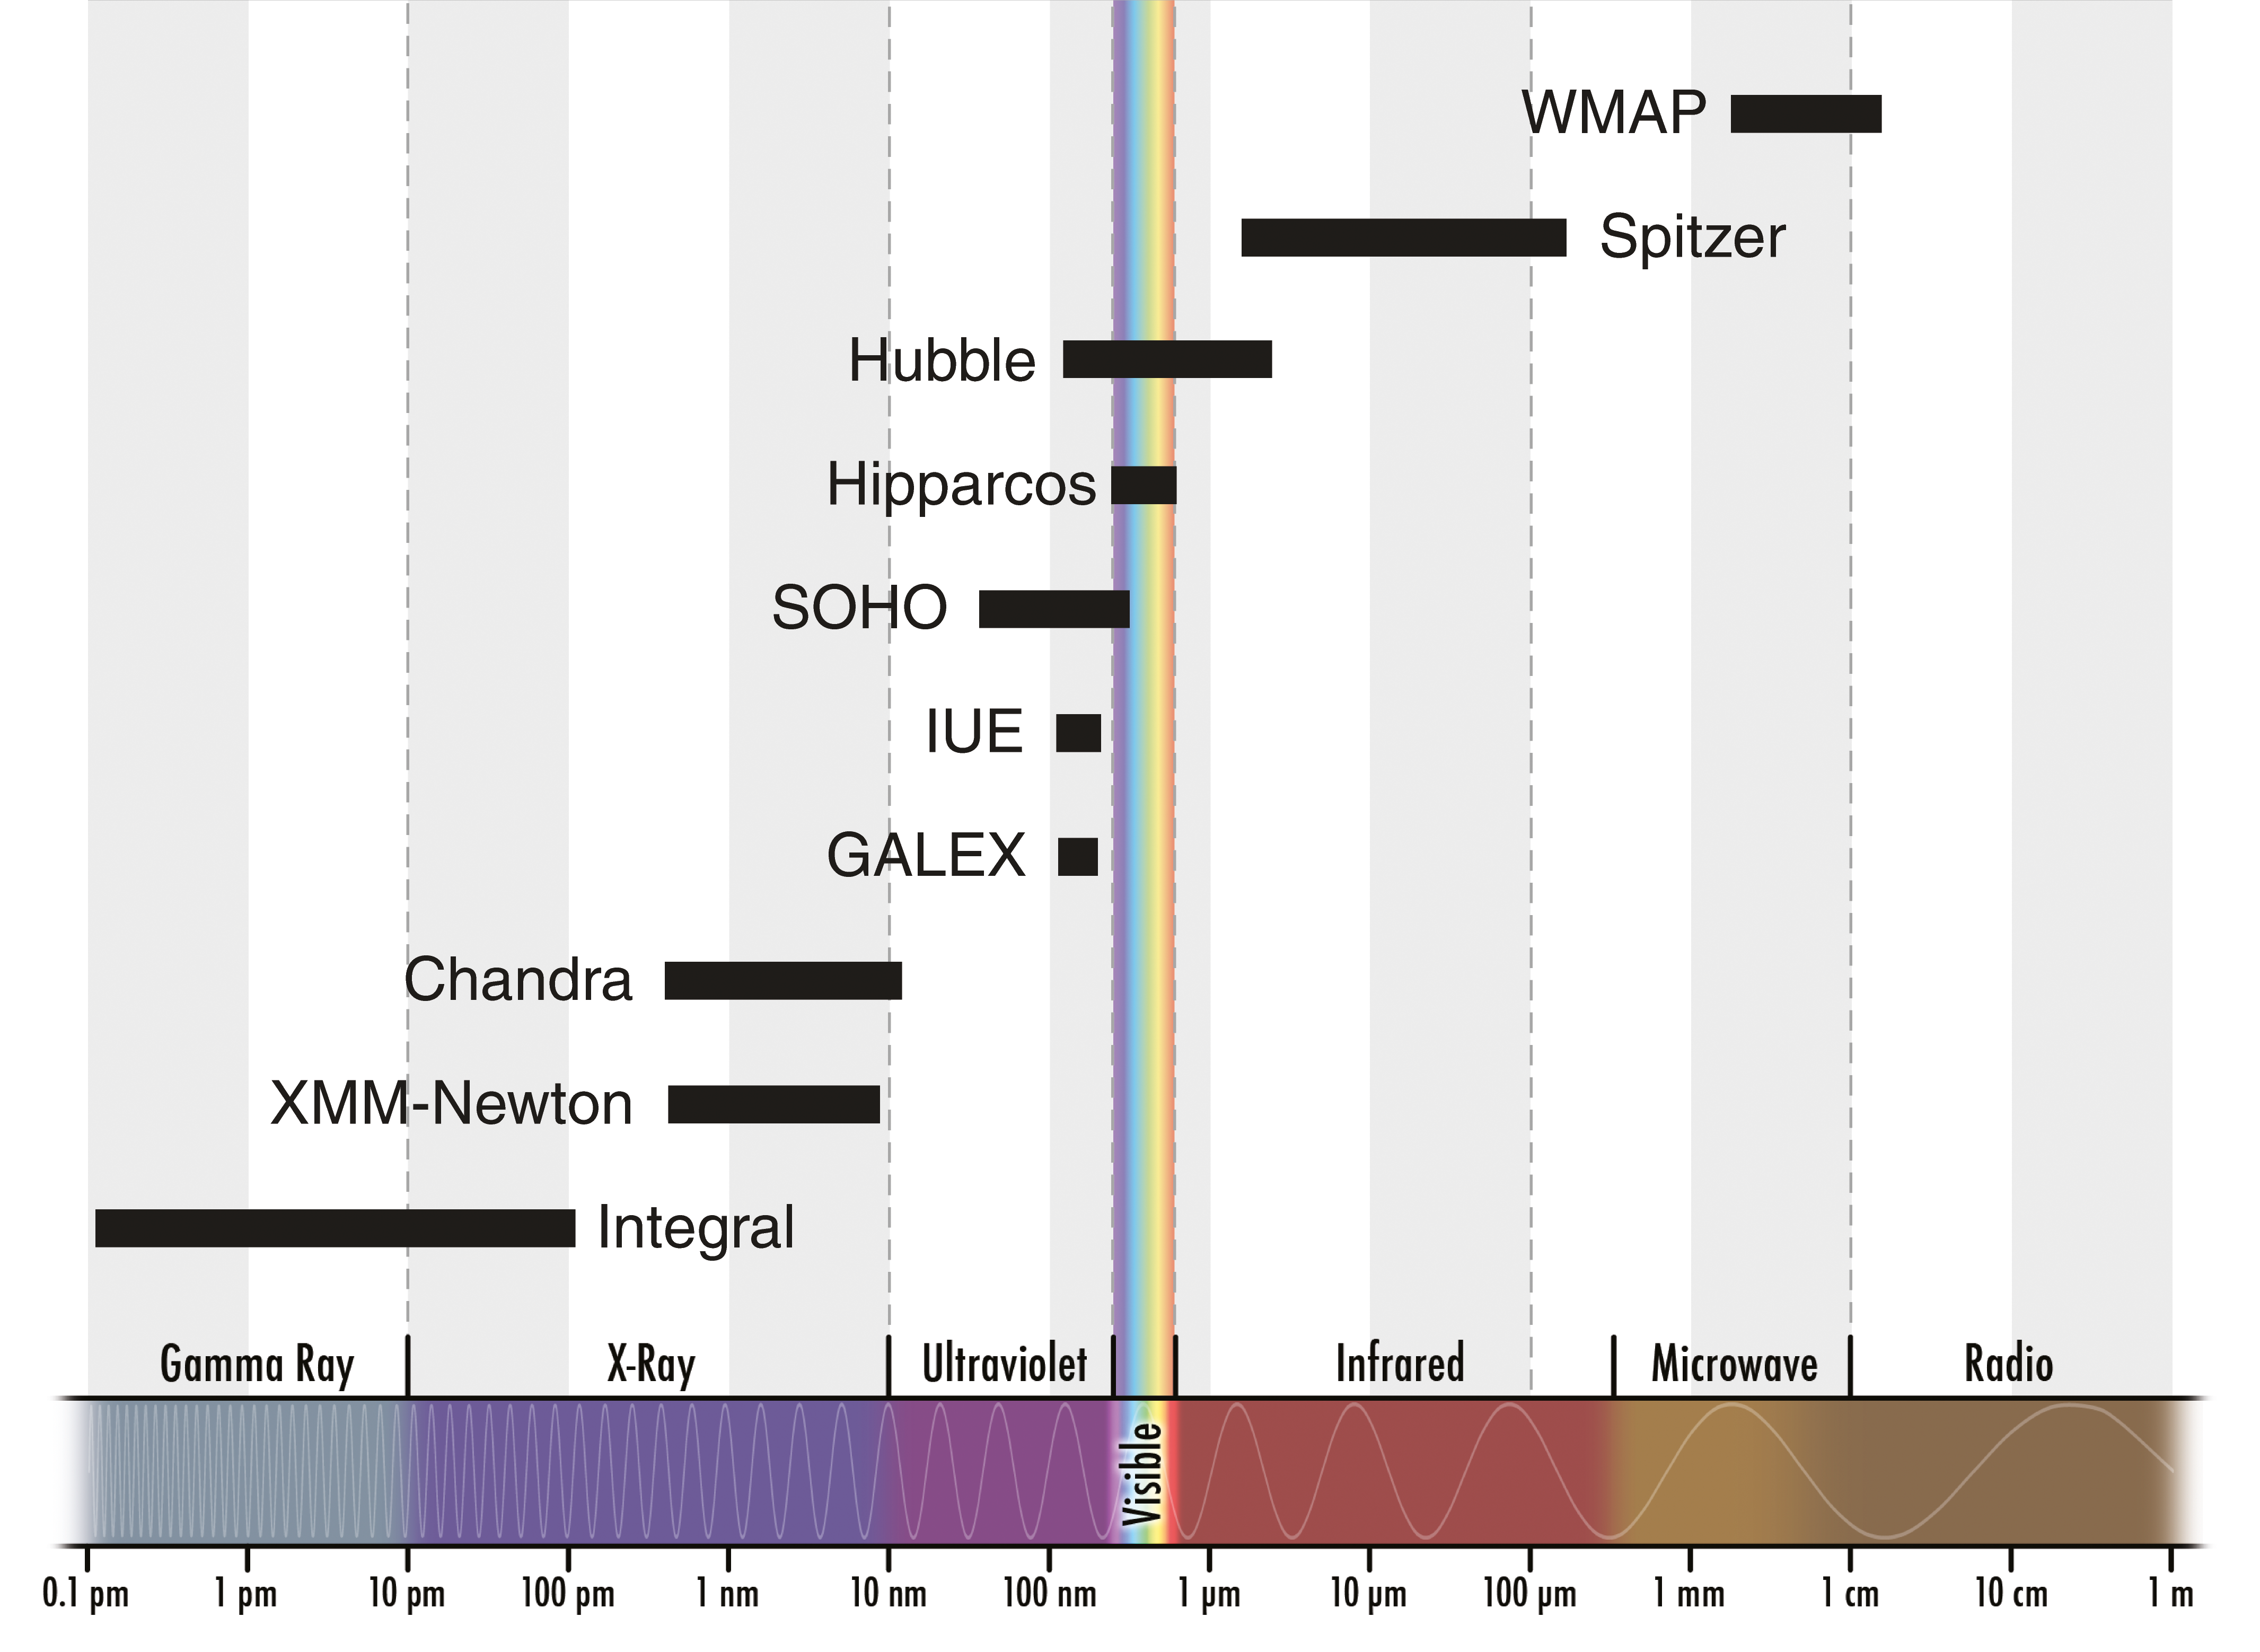

Hubble's sight compared to other space telescopes

This diagram shows the wavelengths at which various space telescopes are designed to see. Hubble can see in the near-infrared, visible and ultraviolet bands of the electromagnetic spectrum, while other telescopes cover different bands — Chandra, for example, peers at the Universe in X-rays, while Spitzer is designed to detect infrared light. Together, these space telescopes span across much of the electromagnetic spectrum

Credit: NASA & ESA